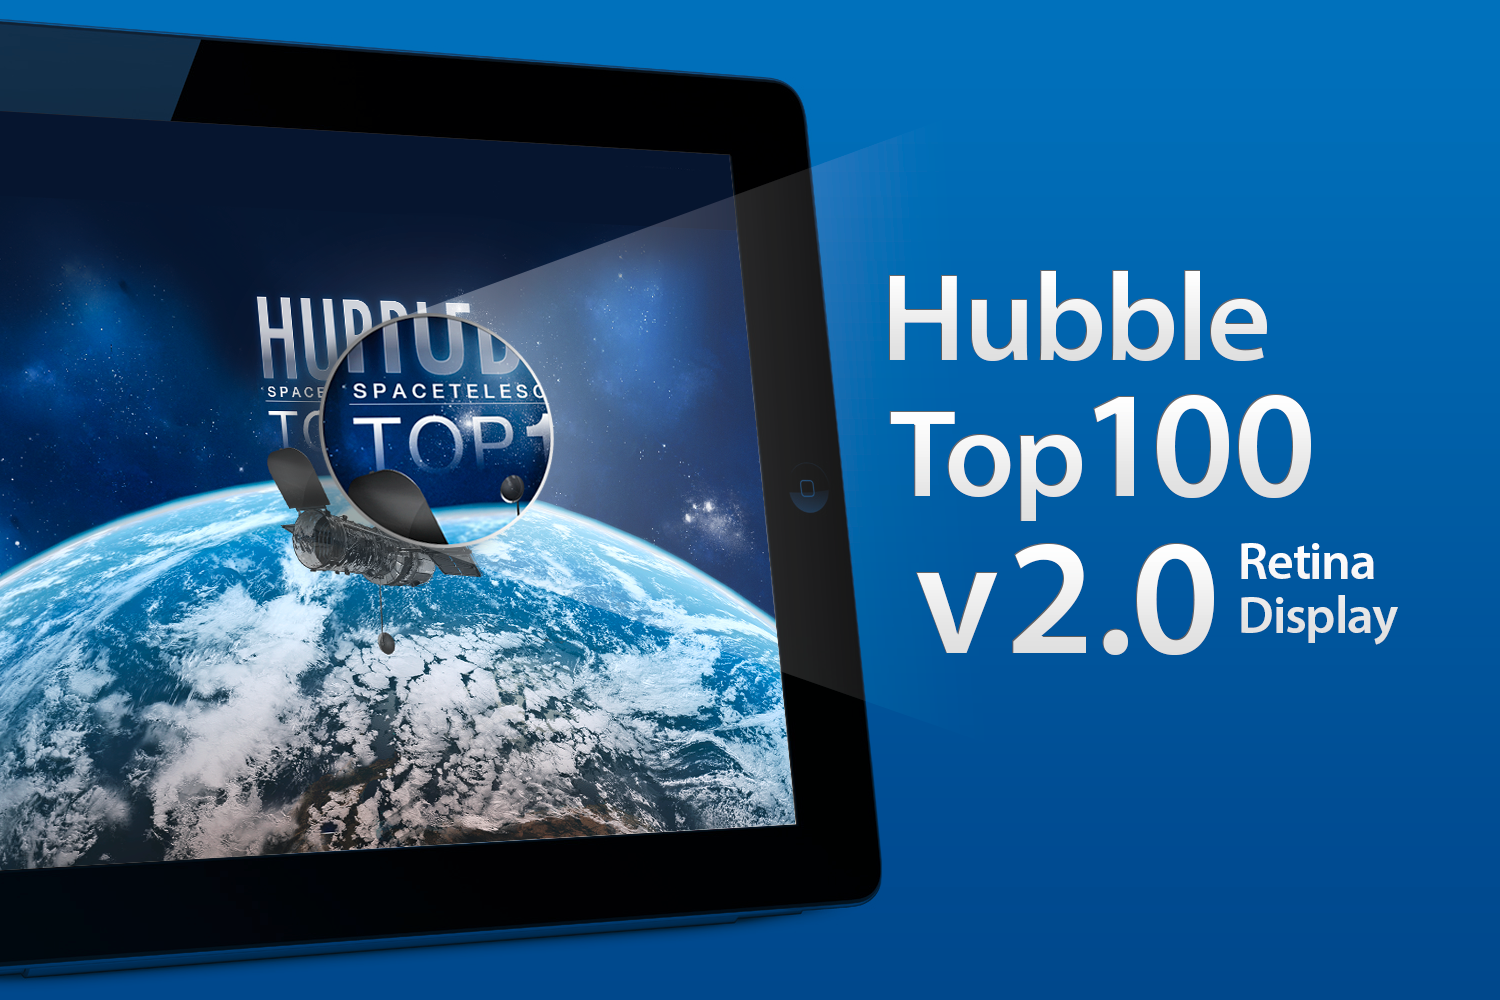

ESA/Hubble top 100 images v2.0 app

The updated version of ESA/Hubble popular Top 100 Images App takes full advantage of the third generation iPad retina display and quad core graphics.

Credit: ESA/Hubble